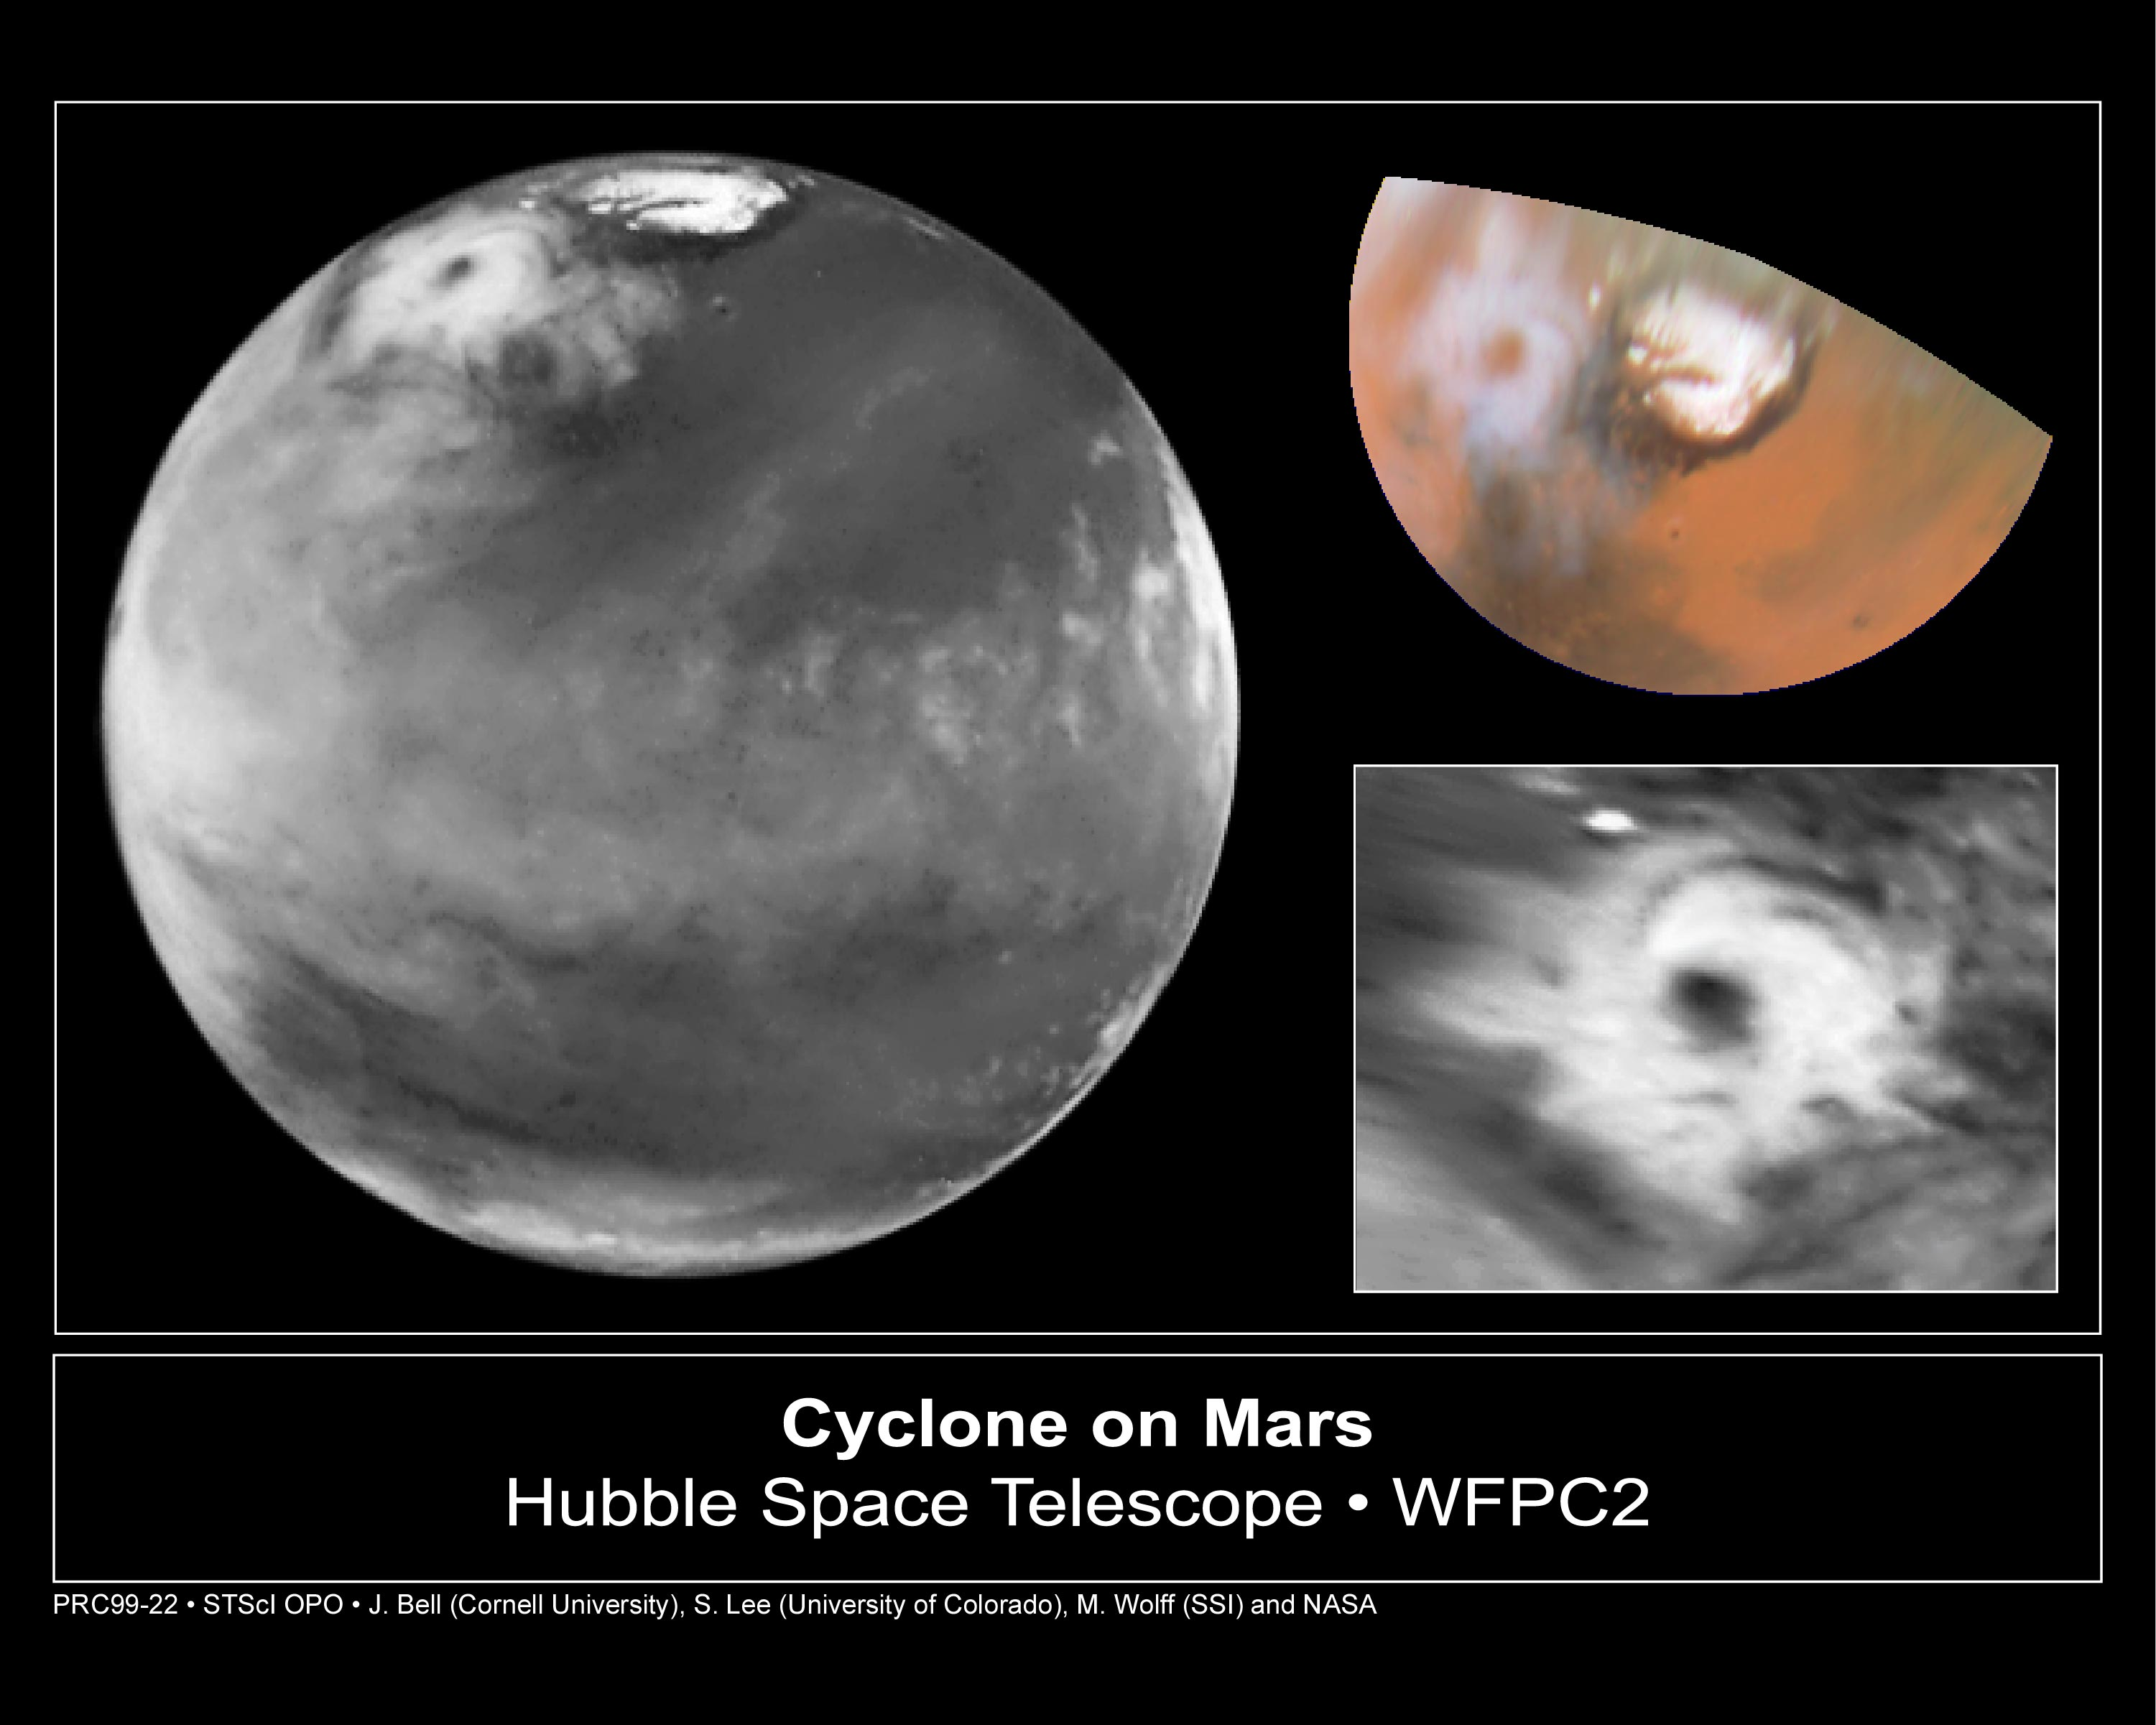

Hubble views collossal polar cyclone on Mars

The storm is located near 65 deg. N latitude and 85 deg. W longitude, and is more than 1000 miles (1600 km) across. The residual north polar water ice cap is at the top of the image. A belt of clouds like that seen in previous telescopic observations during this Martian season can also be seen in the planet's equatorial regions and northern mid-latitudes, as well as in the southern polar regions.

Credit: Jim Bell (Cornell U.), Steve Lee (U. Colorado), Mike Wolff (SSI), and NASA/ESA